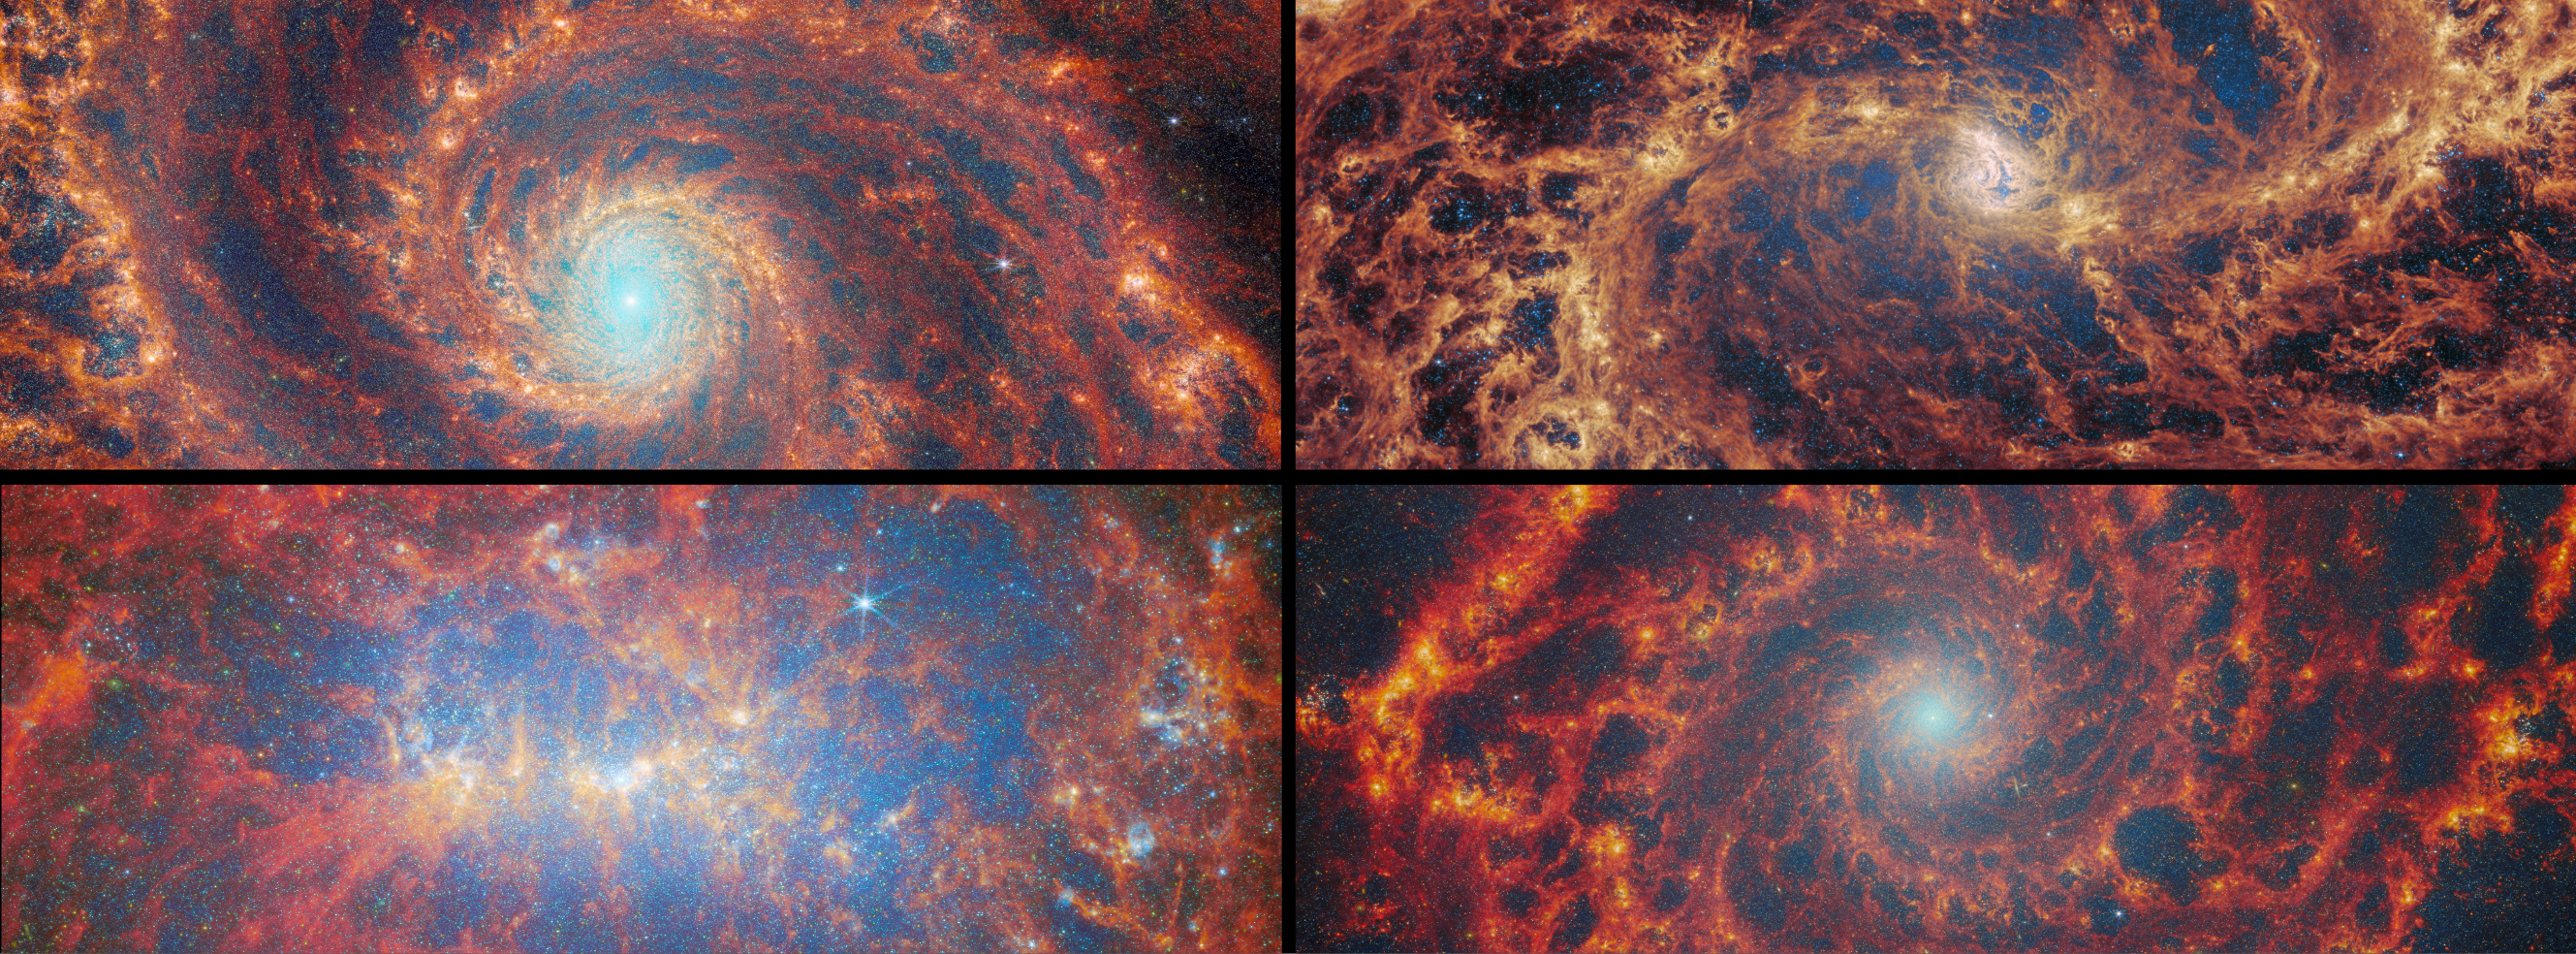

Nearby star-forming FEAST galaxies

Astronomers using the NASA/ESA/CSA James Webb Space Telescope together with the NASA/ESA Hubble Space Telescope have looked deeply at thousands of young star clusters in four nearby galaxies, studying clusters at different stages of evolution. Their findings show that more massive star clusters emerge more quickly from the clouds they are born in, clearing away gas and filling the galaxy with ultraviolet light. The result gives us a more detailed understanding of star formation in galaxies, as well as how and where planets can form.

This image shows the four galaxies studied in this research, each of which has previously been the subject of an ESA/Webb Picture of the Month: Messier 51 (top left), Messier 83 (top right), NGC 4449 (bottom left), and NGC 628 (bottom right).

Credit: ESA/Webb, NASA & CSA, A. Pedrini, A. Adamo (Stockholm University) and the FEAST JWST team